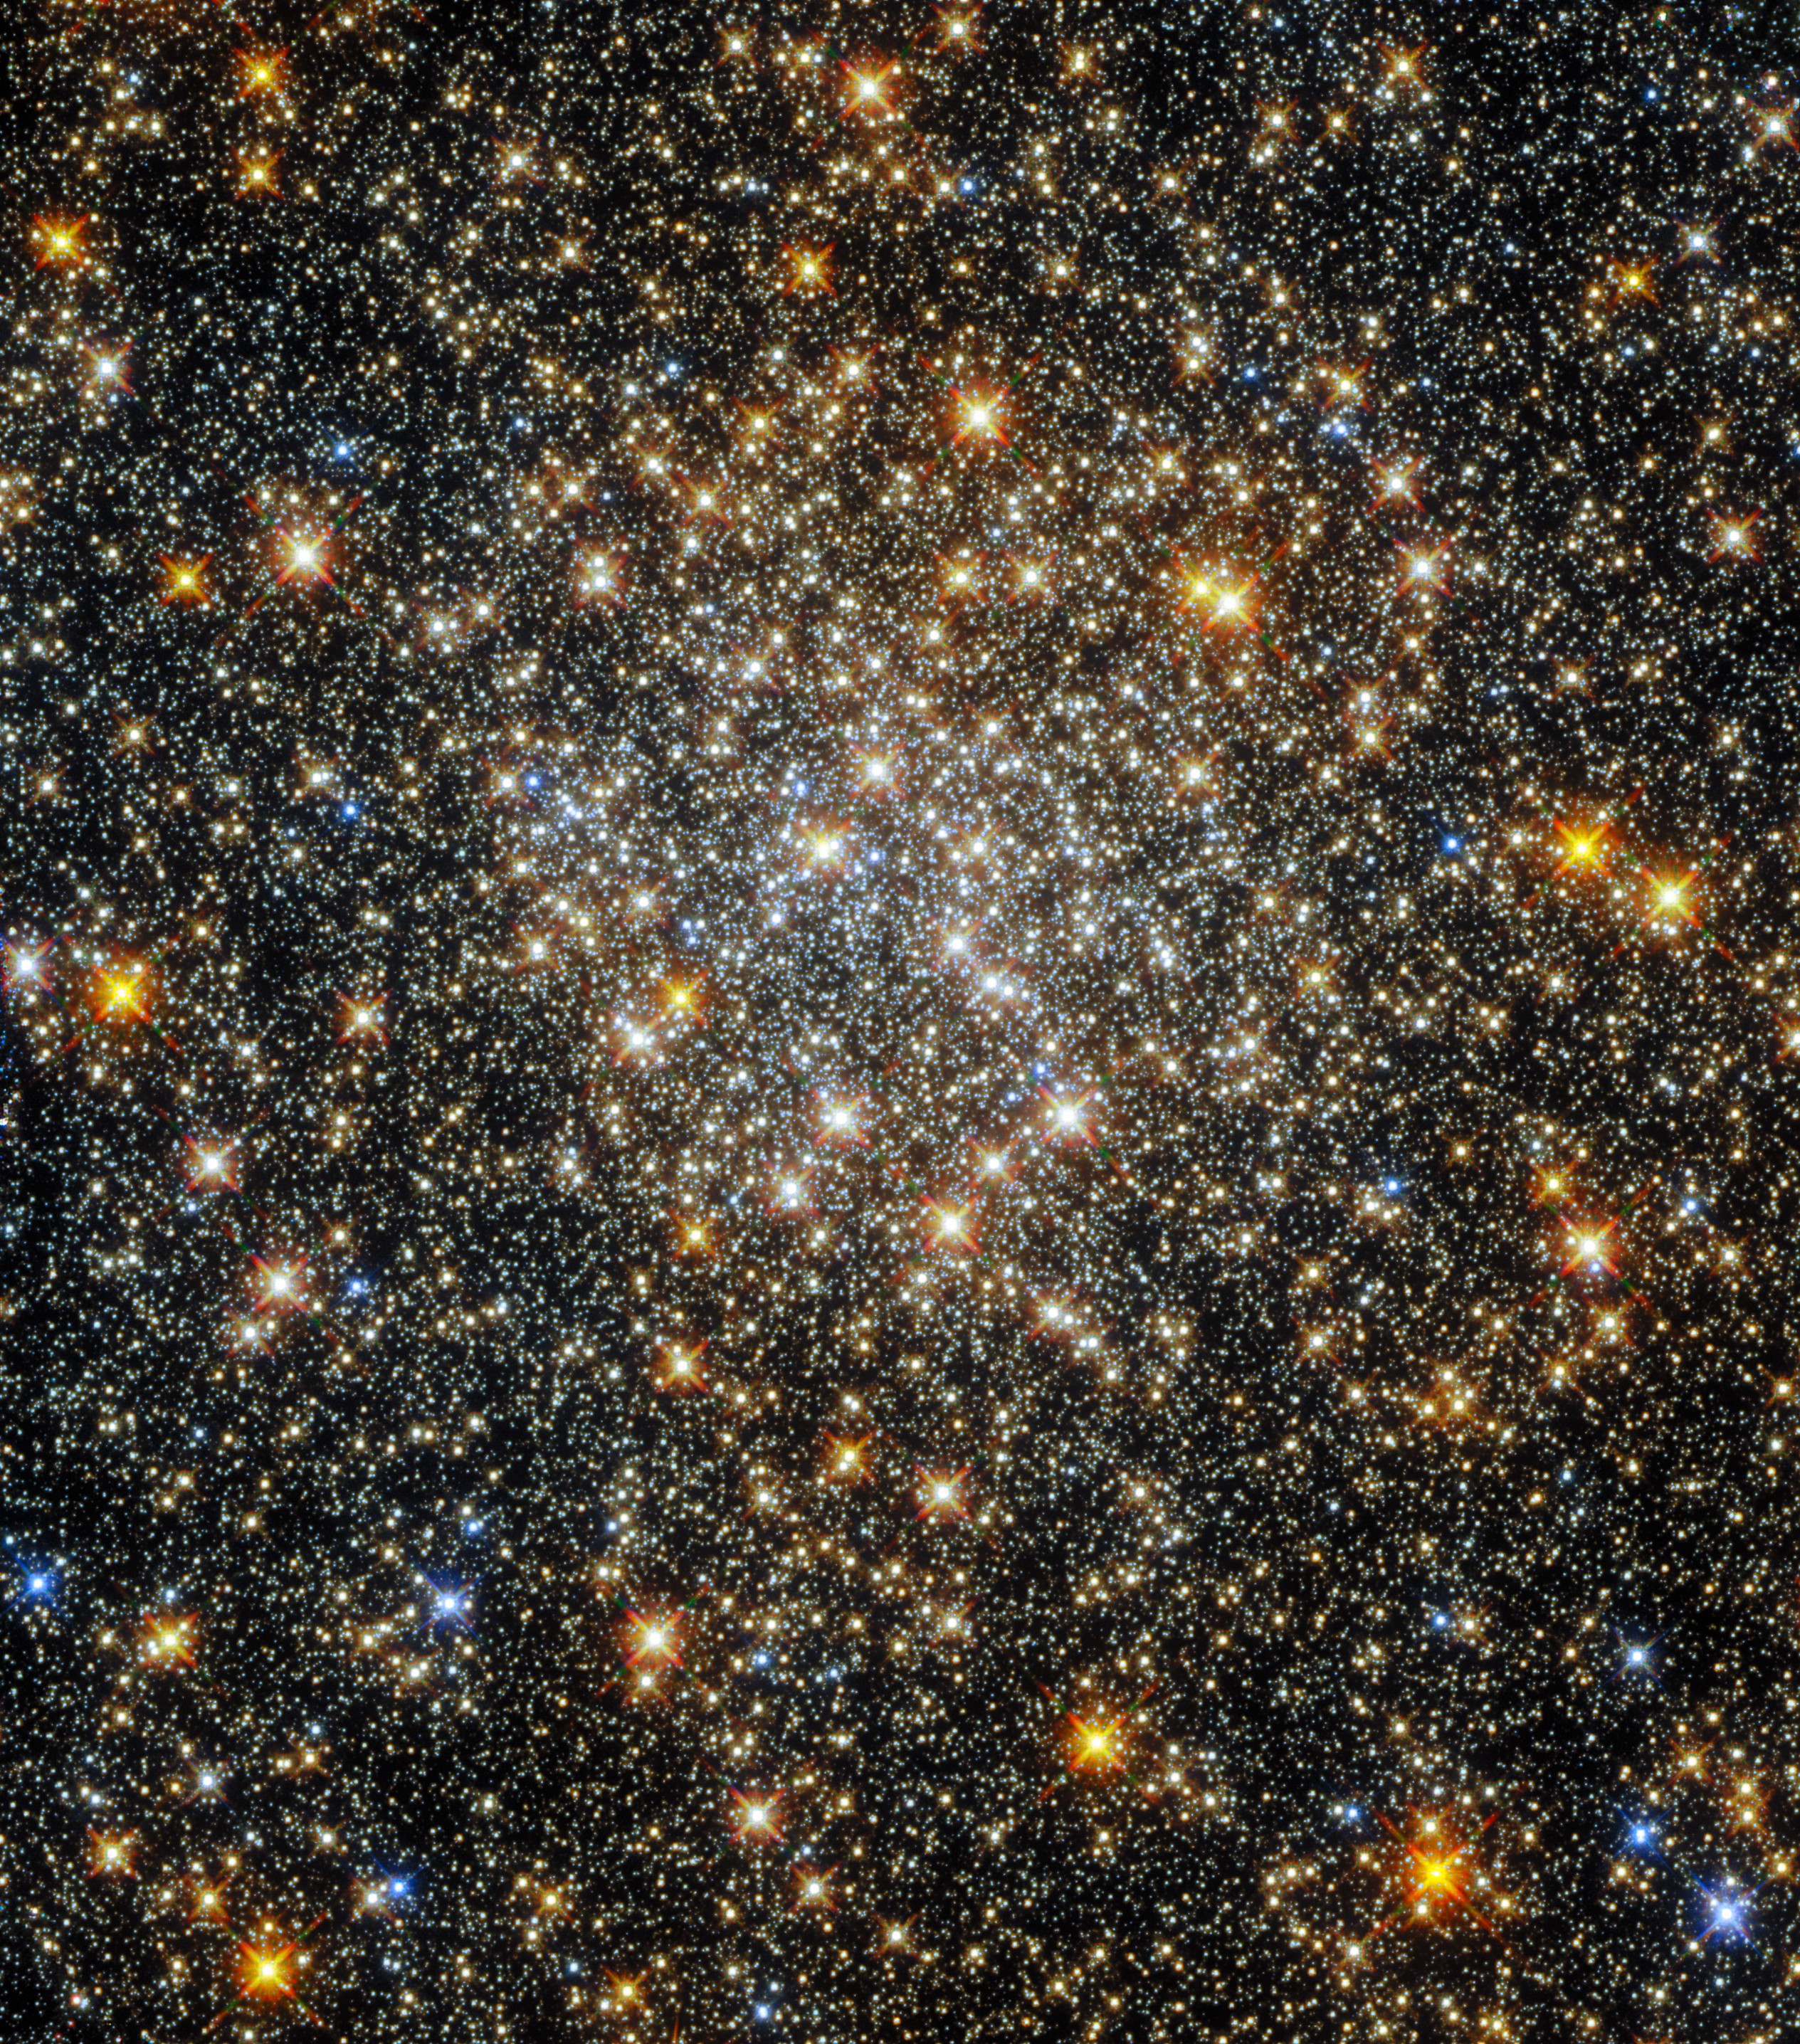

On Clusters and Constellations

This sparkling starfield, captured by the NASA/ESA Hubble Space Telescope’s Wide Field Camera 3 and Advanced Camera for Surveys, contains the globular cluster ESO 520-21 (also known as Palomar 6). A densely packed, roughly spherical collection of stars, it lies close to the centre of the Milky Way, where interstellar gas and dust absorb starlight and make observations more challenging.

This absorption by interstellar material affects some wavelengths of light more than others, changing the colours of astronomical objects and causing them to appear redder than they actually are. Astronomers call this process “reddening”, and it makes determining the properties of globular clusters close to the galactic centre — such as ESO 520-21 — particularly difficult.

ESO 520-21 lies in the constellation Ophiuchus, near the celestial equator. Ophiuchus was one of the 48 constellations which appeared in the writings of the second-century Egyptian astronomer Ptolemy, all of which are among the 88 constellations officially recognised by the International Astronomical Union today. Not all the constellations proposed by astronomers throughout history have survived, however — forgotten or obsolete constellations include Felis (the Cat), Rangifer (the Reindeer), and even Officina Typographica (the Printer’s Workshop).

Credit: ESA/Hubble and NASA, R. Cohen